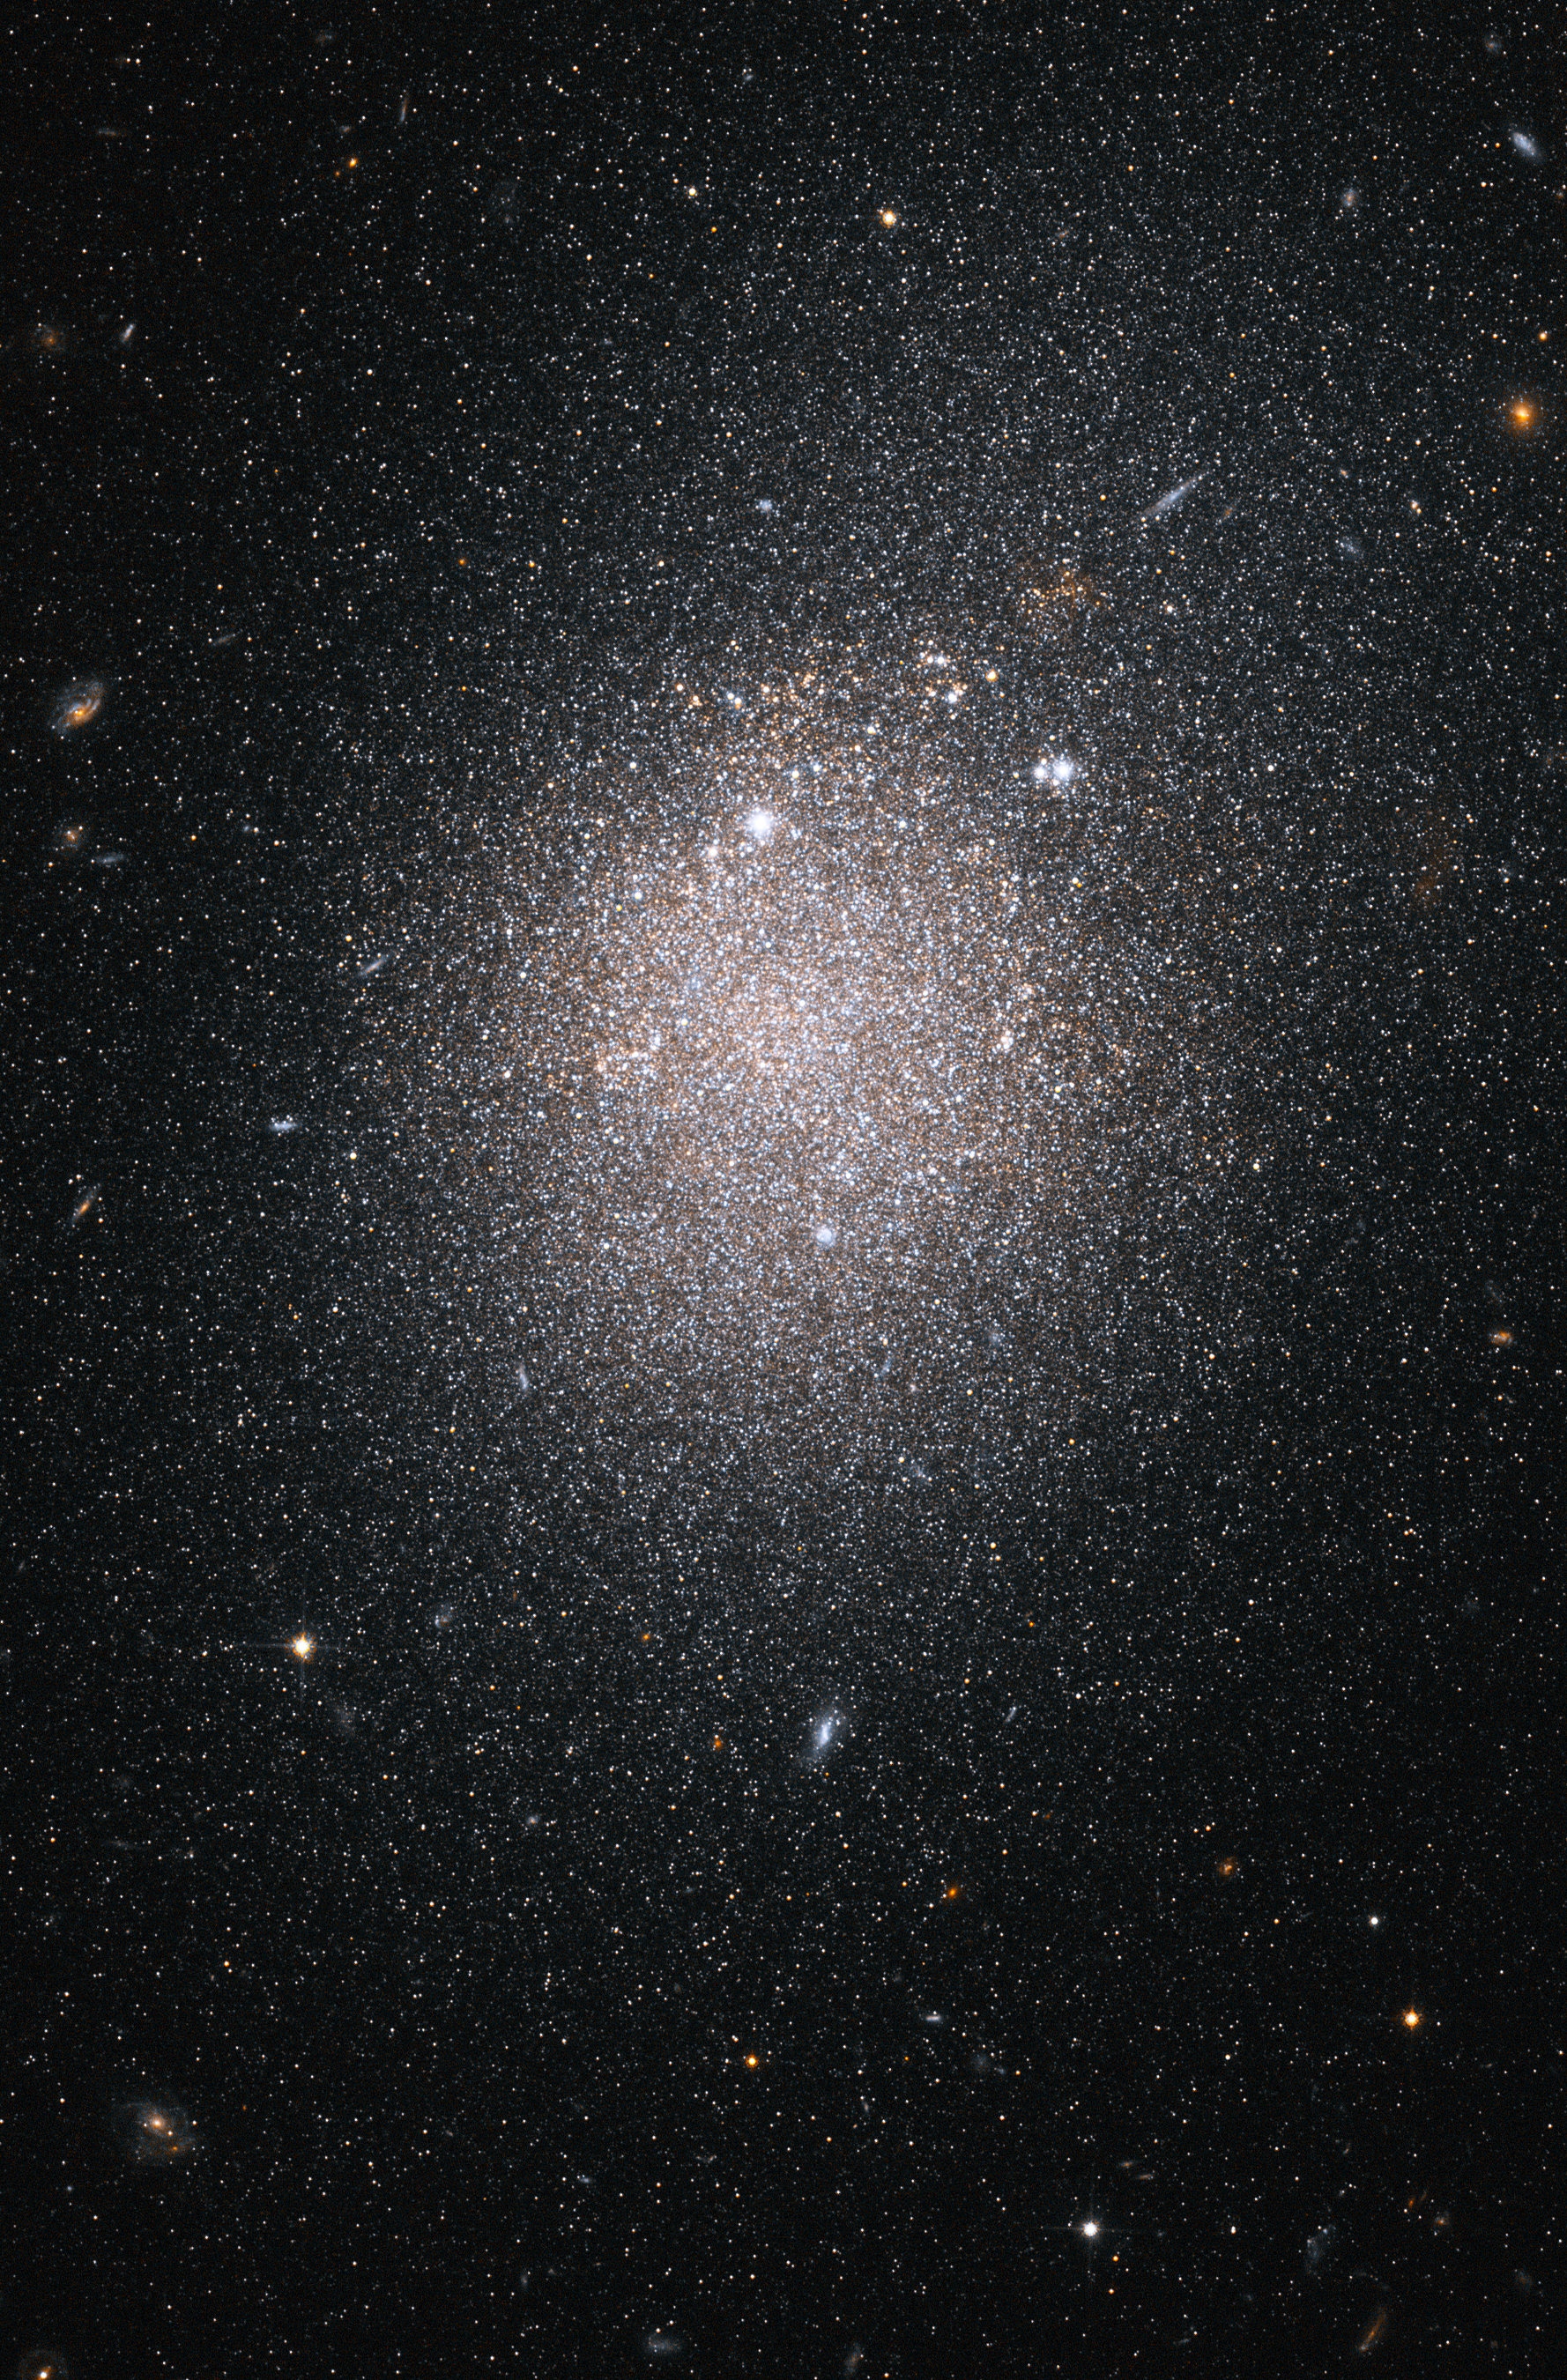

Hubble ACS image of NGC 4163

This image, taken by the NASA/ESA Hubble Space Telescope, shows myriad stars residing in the central region of the dwarf galaxy NGC 4163.

The bluish dots are younger stars; the reddish dots, older stars. The irregularly shaped red blobs are regions of current starburst activity. Starbursts are areas of intense star formation.

NGC 4163 is part of a Hubble study of starbursts in nearby, small, or dwarf, galaxies. Based on this study, astronomers have found that starbursts continue 100 times longer than first thought, lasting 200 million to 400 million years. These galaxies show that starbursts are not isolated events, but sweep across a galaxy.

Credit: NASA, ESA and K. McQuinn (University of Minnesota, Minneapolis)